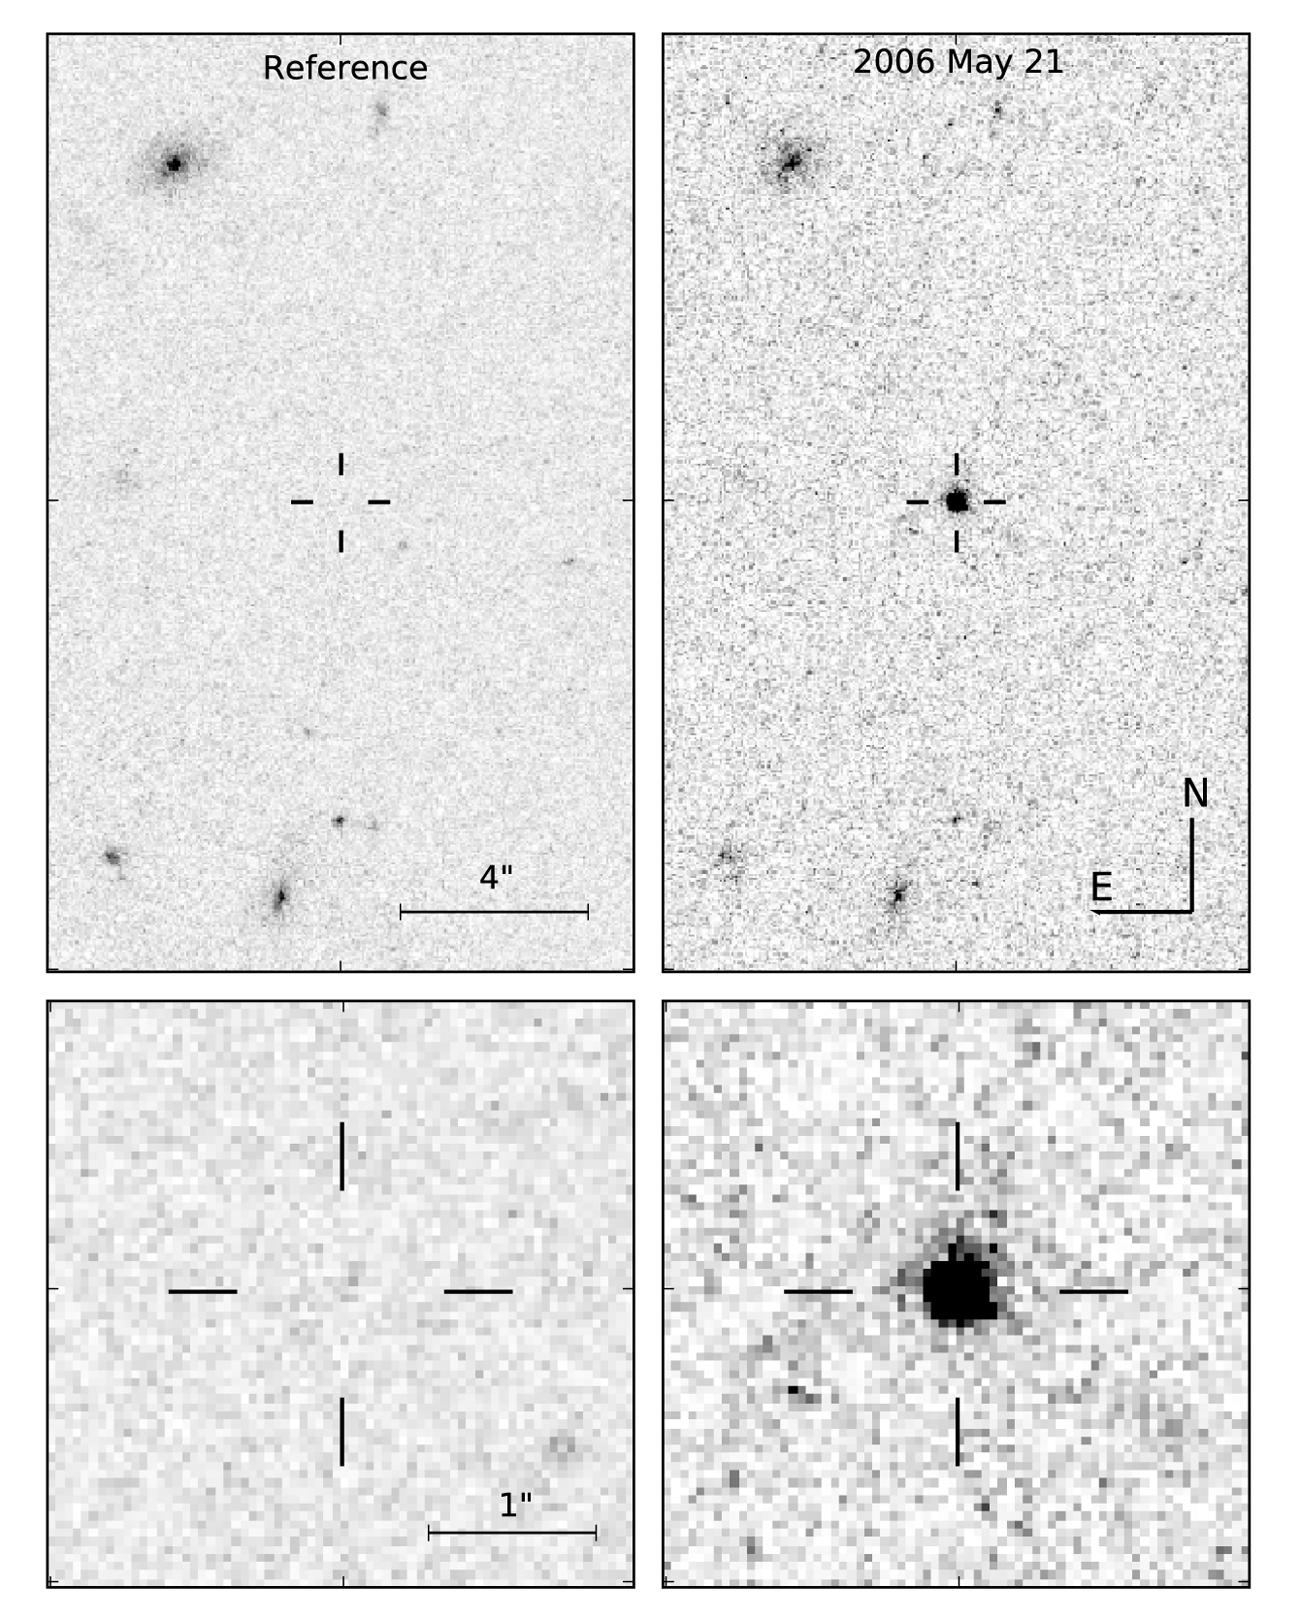

Mystery object spied with Hubble

Astronomers using the NASA/ESA Hubble Space Telescope have observed a mystery object in the constellation of Böotes. Despite detailed analysis of the light emitted by the object, astronomers are puzzled by the nature of and distance to the object known as SCP 06F6.

All we know comes from a series of observations made over the course of a few months. The object was first detected on 21 February 2006 while scientists were using Hubble to survey very distant galaxy clusters for supernovae. The object continued to brighten by a factor of over 100 during the course of the next three months, without exceeding magnitude 21, and then faded away in an identical manner. This in itself is highly unusual – most light curves from transient events are not symmetrical, but have a rapid rise and a slow decay.

The second part to this mystery is the spectrum. Follow-up observations with ground based observatories, including the ESO's Very Large Telescope, uncovered features in the object's spectrum. The light in the blue region shows broad line features, while the red region shows continuous emission. Currently there is no other known object to have this kind of spectrum.

The final part of the mystery is the object's distance. Efforts to measure the motion of the object on the sky failed. This places the object at least 130 light-years away. The object, however, could also be extragalactic given its proximity on the sky to the centre of a known cluster of galaxies (CL 1432.5+3332.8) at a distance of 8.2 billion light-years.

It is likely, therefore, that these observations represent the discovery of a potentially new class of transient object since there is no known comparison for either the light curve, or the spectrum. Objects of this unknown class could potentially be of great interest for future sky survey programmes.

Image caption: The sudden appearance of the transient "mystery object" SCP 06F6 in Hubble field of view. The lower image represents a zoomed in view.

Credit: NASA & ESA